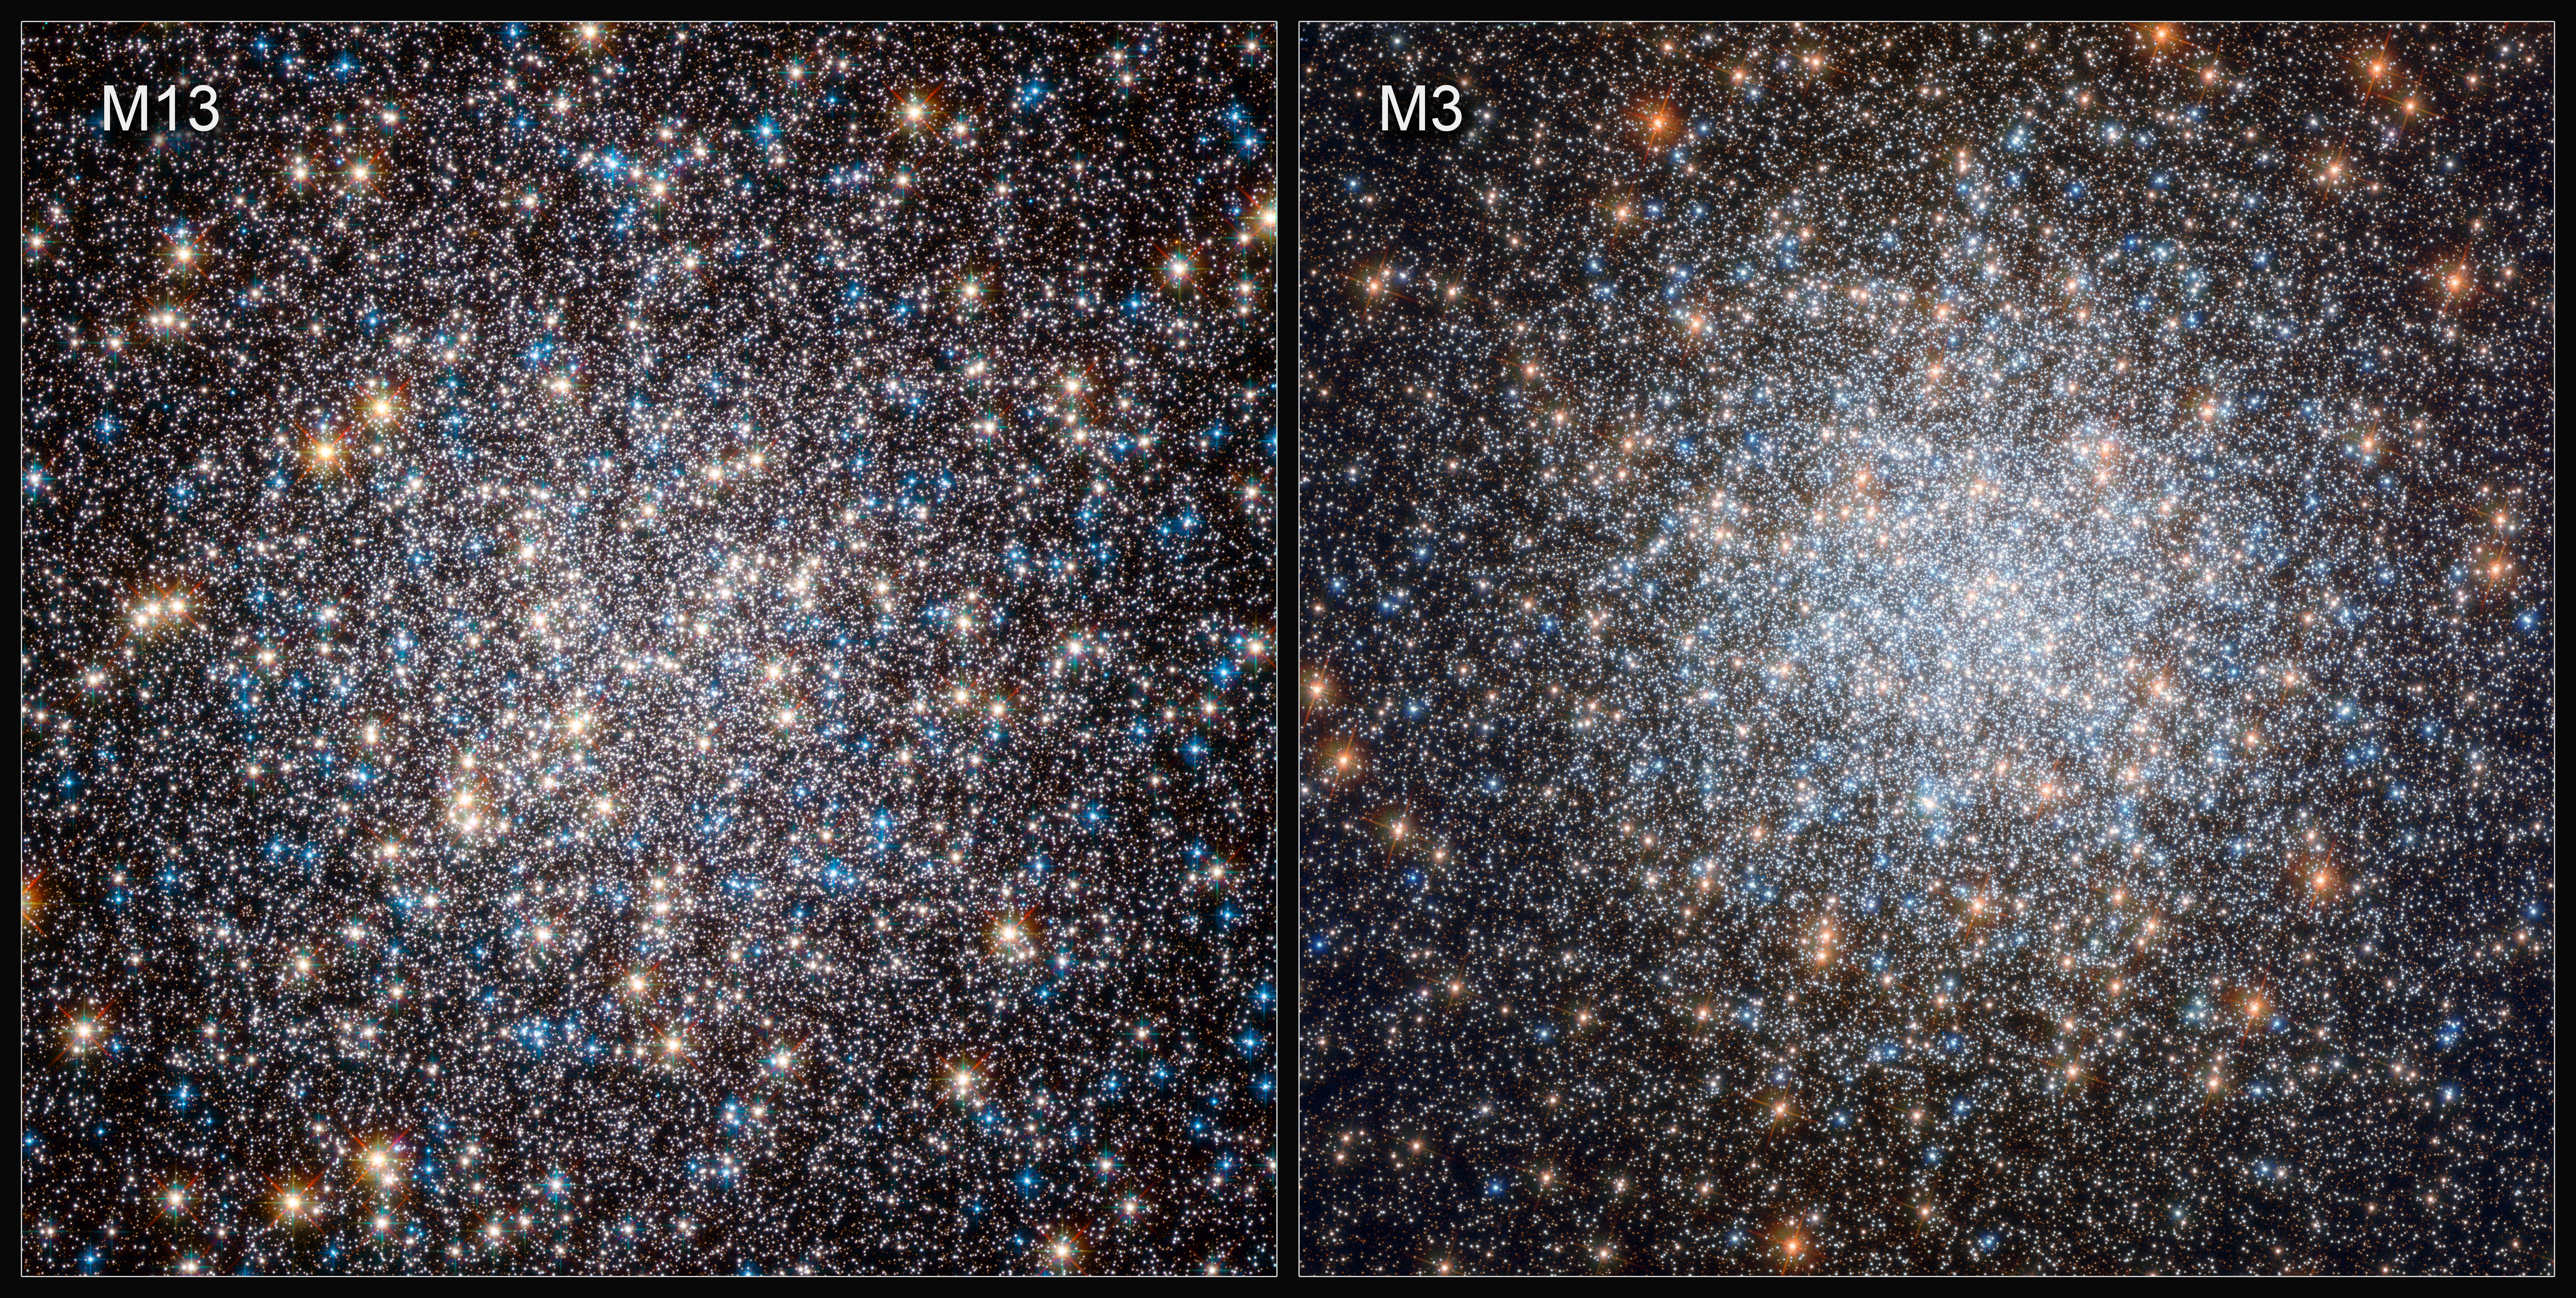

Hubble’s Views of M13 (2010) and M3 (2019)

To investigate the physics underpinning white dwarf evolution, astronomers compared cooling white dwarfs in two massive collections of stars: the globular clusters M3 and M13. These two clusters share many physical properties such as age and metallicity but the populations of stars which will eventually give rise to white dwarfs are different. This makes M3 and M13 together a perfect natural laboratory in which to test how different populations of white dwarfs cool.

Credit: ESA/Hubble & NASA, G. Piotto et al.